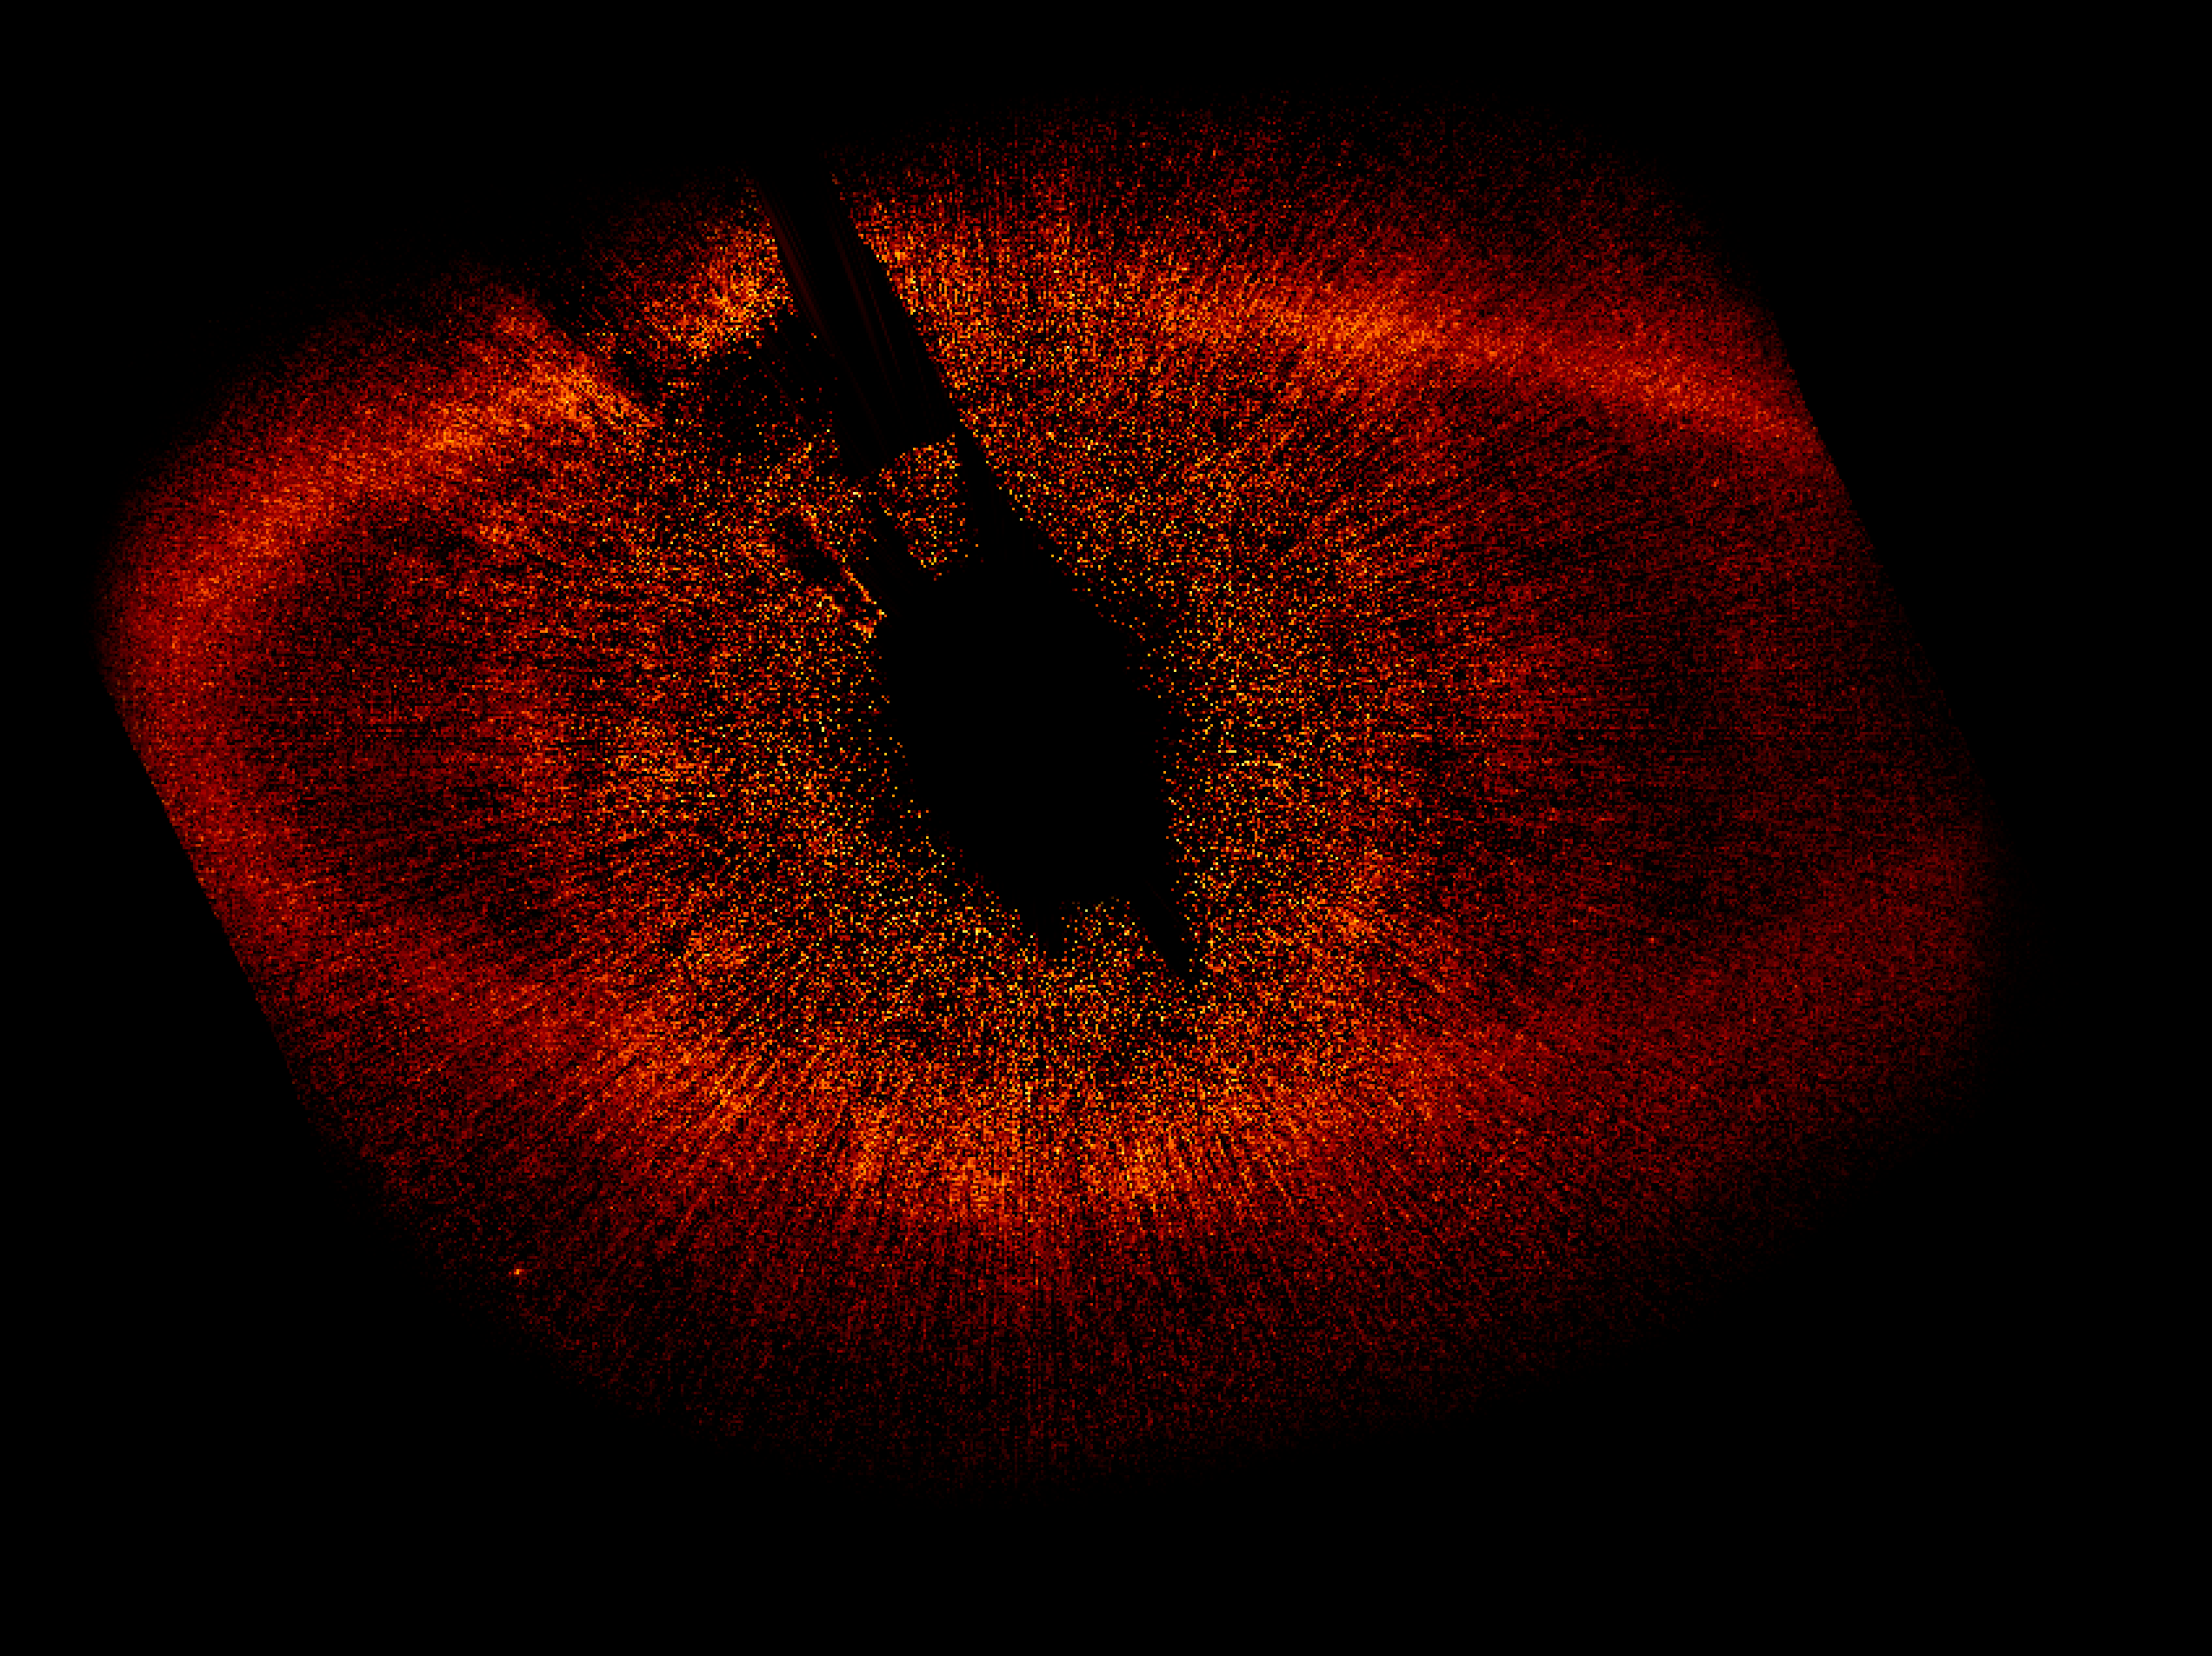

HST ACS/HRC wide view of Fomalhaut system

The large disk of gas surrounding Fomalhaut is clearly visible in this image. It is not centred on Fomalhaut quite as predicted, hinting that the gravity of another body – perhaps a planet – is pulling it out of shape.

Credit: NASA, ESA and P. Kalas (University of California, Berkeley, USA)